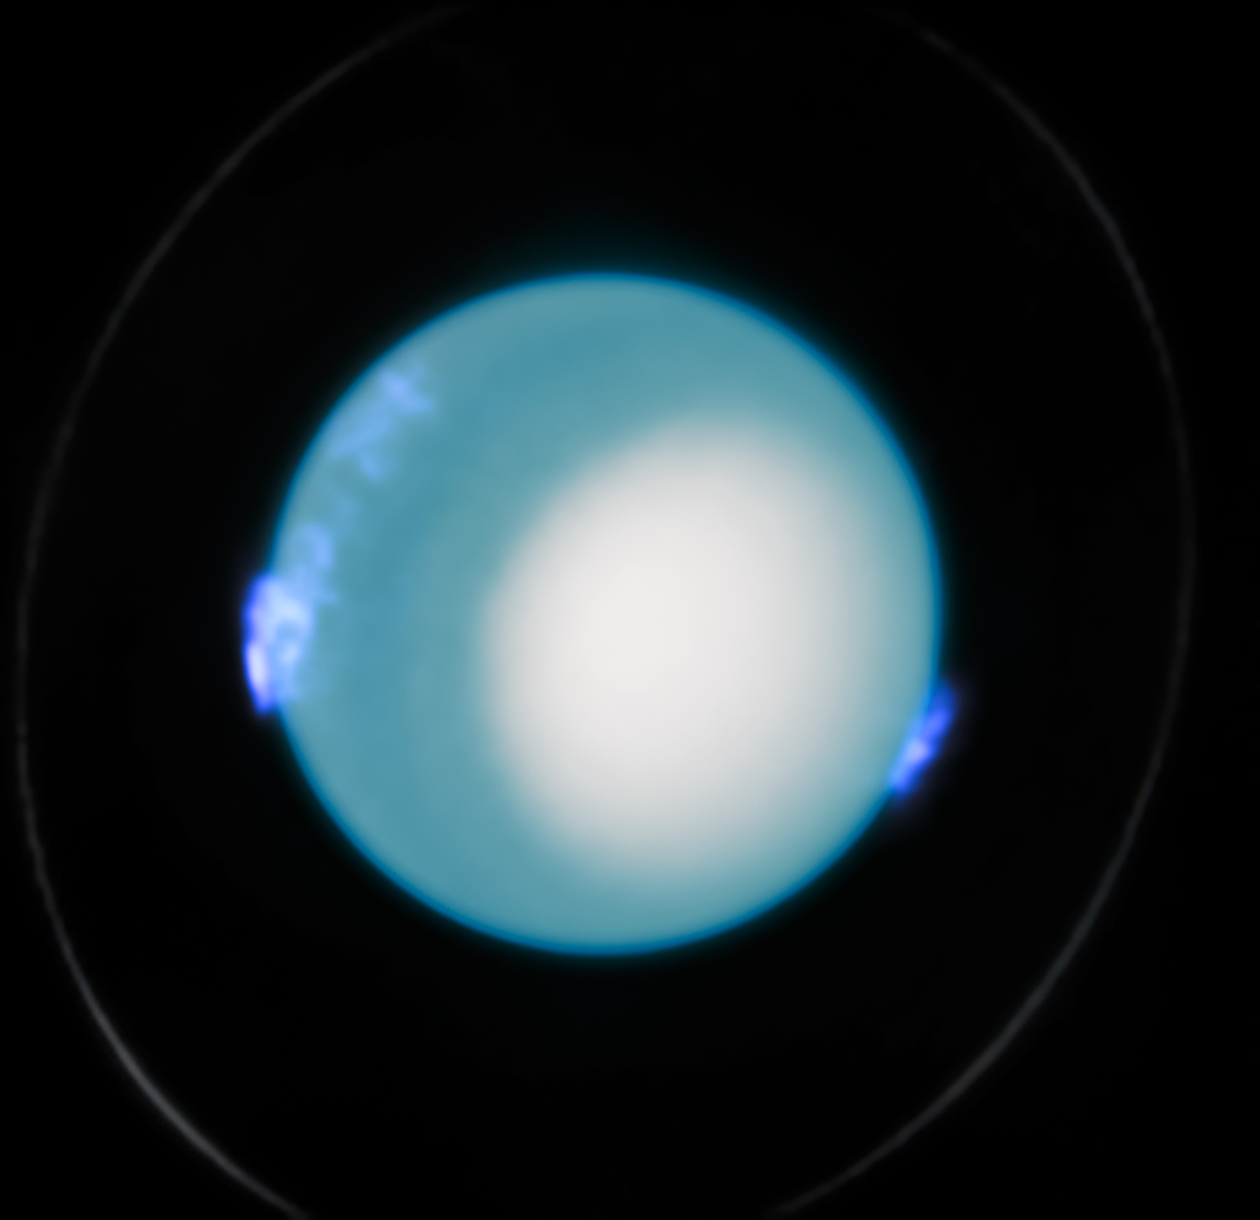

Close-up: Uranus aurorae (October 2022)

This image of Uranus’ aurorae was taken by the NASA/ESA Hubble Space Telescope on 10 October 2022. These observations were made by the Space Telescope Imaging Spectrograph (STIS) and includes both visible and ultraviolet data.

An international team of astronomers used Hubble to make new measurements of Uranus' interior rotation rate by analysing more than a decade of the telescope’s observations of Uranus’ aurorae. This refinement of the planet’s rotation period achieved a level of accuracy 1000 times greater than previous estimates and serves as a crucial new reference point for future planetary research.

Credit: ESA/Hubble, NASA, L. Lamy, L. Sromovsky